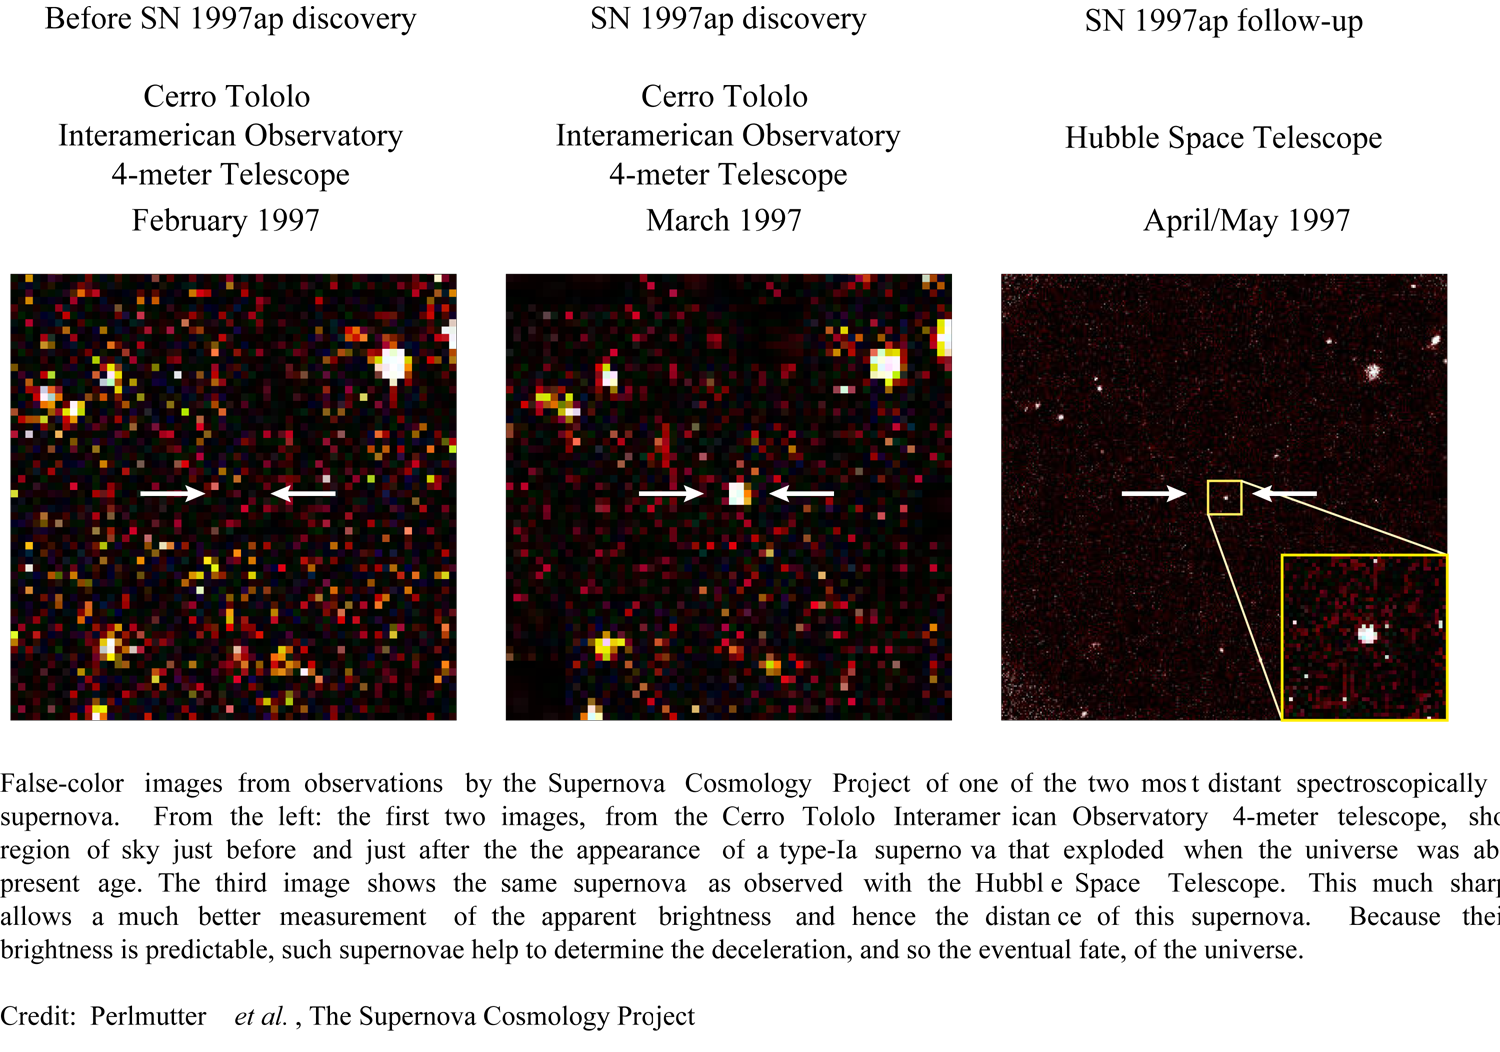

Supernova 1997ap

False-color images from observations by the Supernova Cosmology Project of one of the two most distant spectroscopically confirmed supernova. From the left: the first two images, from the Cerro Tololo Interamerican Observatory 4-meter telescope, show a small region of sky just before and just after the the appearance of a type-Ia supernova that exploded when the universe was about half its present age. The third image shows the same supernova as observed with the Hubble Space Telescope. This much sharper picture allows a much better measurement of the apparent brightness and hence the distance of this supernova. Because their intrinsic brightness is predictable, such supernovae help to determine the deceleration, and so the eventual fate, of the universe.

Credit: S. Perlmutter (Lawrence Berkeley National Laboratory) and NASA/ESA